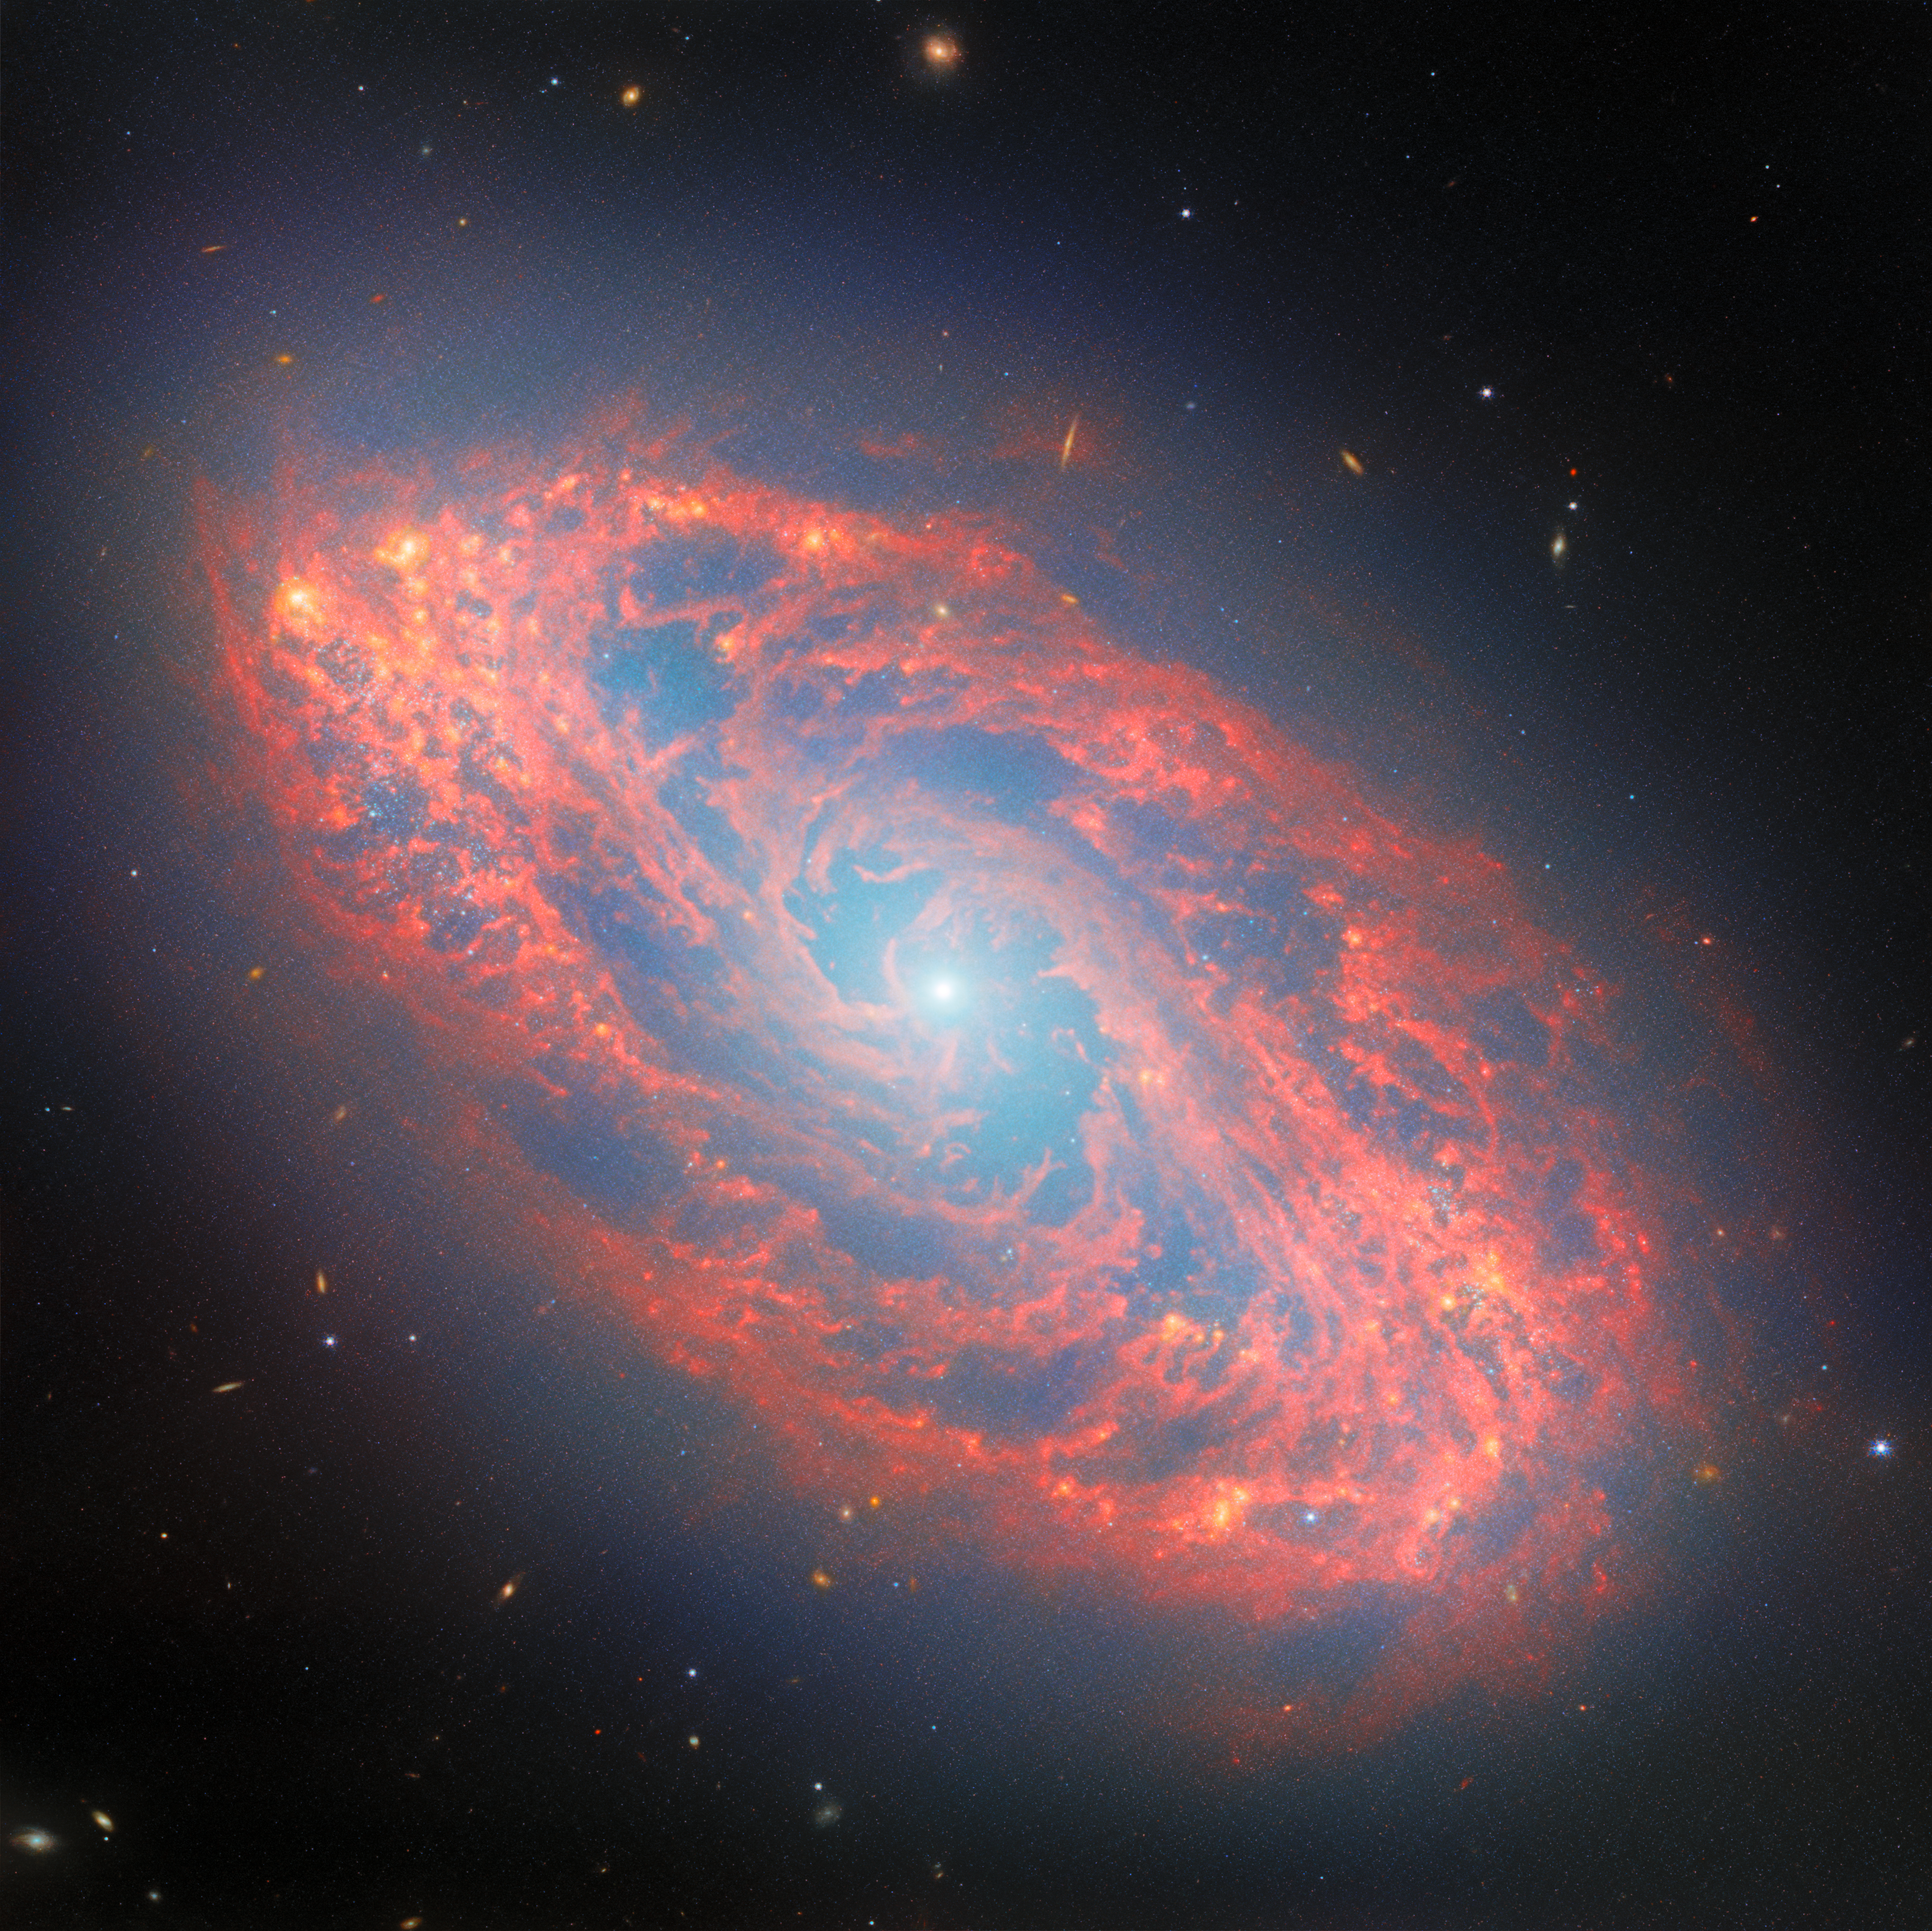

The stellar lifecycle in a nearby spiral

Two powerful instruments of the NASA/ESA/CSA James Webb Space Telescope joined forces to create this scenic galaxy view for today’s Picture of the Month. This spiral galaxy is named NGC 5134, and it’s located 65 million light-years away in the constellation Virgo.

Though 65 million light-years may seem like a huge distance — the light that Webb collected to create this image has been journeying to us from NGC 5134 since soon after Tyrannosaurus rex went extinct — NGC 5134 is fairly close by as far as galaxies go. Because of the galaxy’s relative proximity, Webb can spot incredible details in its tightly wound spiral arms.

Webb’s Mid-InfraRed Instrument (MIRI) collects the mid-infrared light emitted by the warm dust that speckles NGC 5134’s interstellar clouds, tracing clumps and strands of dusty gas. Some of the dust is composed of complex organic molecules called polycyclic aromatic hydrocarbons, which feature interconnected rings of carbon atoms and provide a way for astronomers to study the chemistry happening in interstellar clouds. Webb’s Near-InfraRed Camera (NIRCam) records shorter-wavelength near-infrared light, mostly from the stars and star clusters that dot the galaxy’s spiral arms.

Together, the MIRI and NIRCam data paint a portrait of a galaxy in constant ebb and flow. The gas clouds that billow along NGC 5134’s spiral arms are the sites of star formation, and each star that forms chips away at the galaxy’s supply of star-forming gas. When stars die, they recycle some of that gas back into the galaxy. Massive stars more than about eight times the mass of the Sun do so spectacularly, in cataclysmic supernova explosions that spread stellar material across hundreds of light-years.

Stars like the Sun give back some of their material as well, though more gently; these stars will balloon into bubbling red giants before shrugging off their atmospheres and sending them into space. Whether expelled by explosive supernovae or gentle red giants, this gas can then be incorporated into new stars.

This give and take between gas and stars is the focus of the observing programme (#3707) for which these images were taken. This programme aims to study 55 galaxies in the nearby Universe that are actively forming new stars and have been studied across a broad range of wavelengths. The new Webb data contribute a rich understanding of individual star clusters and star-forming clouds and have already been used to study the life cycle of tiny dust grains, the shape and properties of star-forming clouds, the links between interstellar gas and dust, and the process by which newly formed stars reshape their surrounding environment.

By using Webb to study the infrared light nearby galaxies like NGC 5134 whose stars and gas can be seen in detail, astronomers can apply their knowledge to galaxies too distant to be observed so closely — like those that are scattered in the background of this image, barely more than points of light.

Credit: ESA/Webb, NASA & CSA, A. Leroy